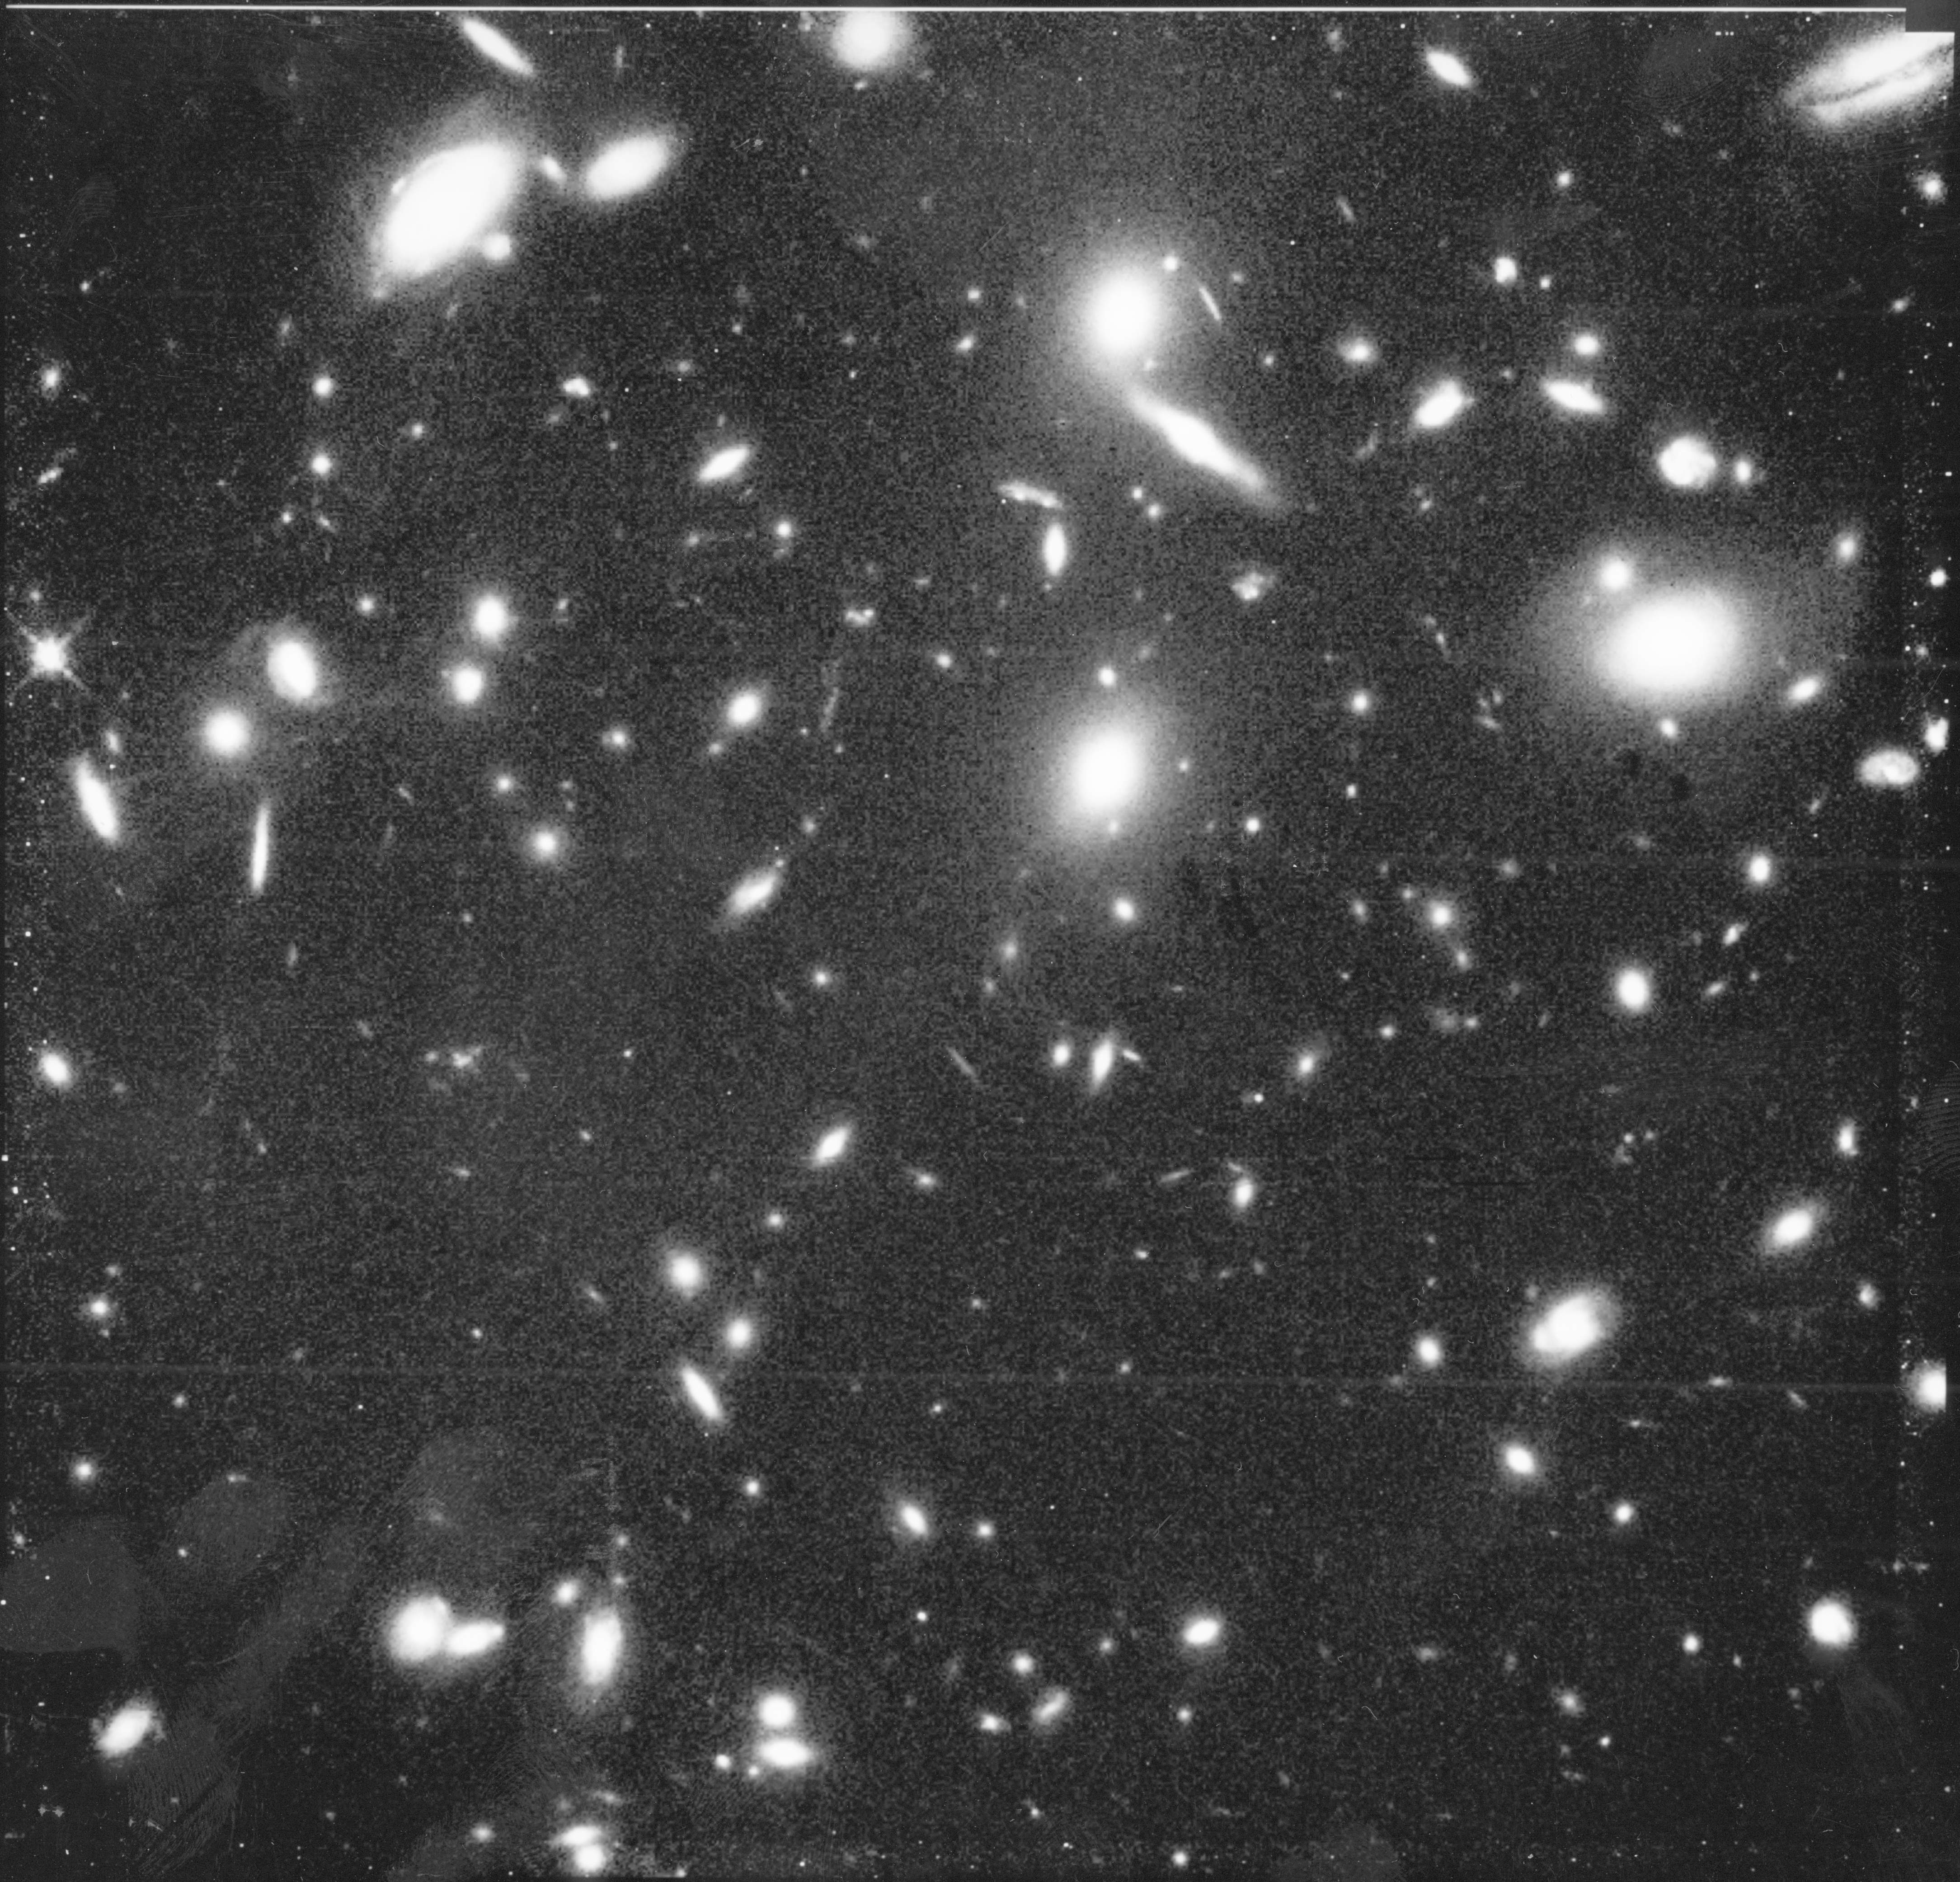

Hubble observes the lost ancestors to our Milky Way galaxy

This NASA/ESA Hubble Space Telescope (HST) image of the central portion of a remote cluster of galaxies (CL 0939+4713) as it looked when the universe was two-thirds of its present age. Hubble's high resolution allows astronomers to study, for the first time, the shapes of galaxies as they were long ago.

The Space Telescope pictures are sharp enough to distinguish between various forms of spiral galaxies. Most of the spiral, or disk, galaxies have odd features, suggesting they were easily distorted within the environment of the rich cluster. Hubble reveals a number of mysterious "fragments" of galaxies interspersed through the cluster.

Credit: Alan Dressier (Carnegie Institution) and NASA/ESA